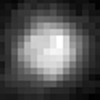

The Surface of Pluto

The never-before-seen surface of the distant planet Pluto is resolved in these Hubble Space Telescope pictures, taken with the European Space Agency's (ESA) Faint Object Camera (FOC) aboard Hubble.

Credit: Alan Stern (Southwest Research Institute), Marc Buie (Lowell Observatory), NASA and ESA